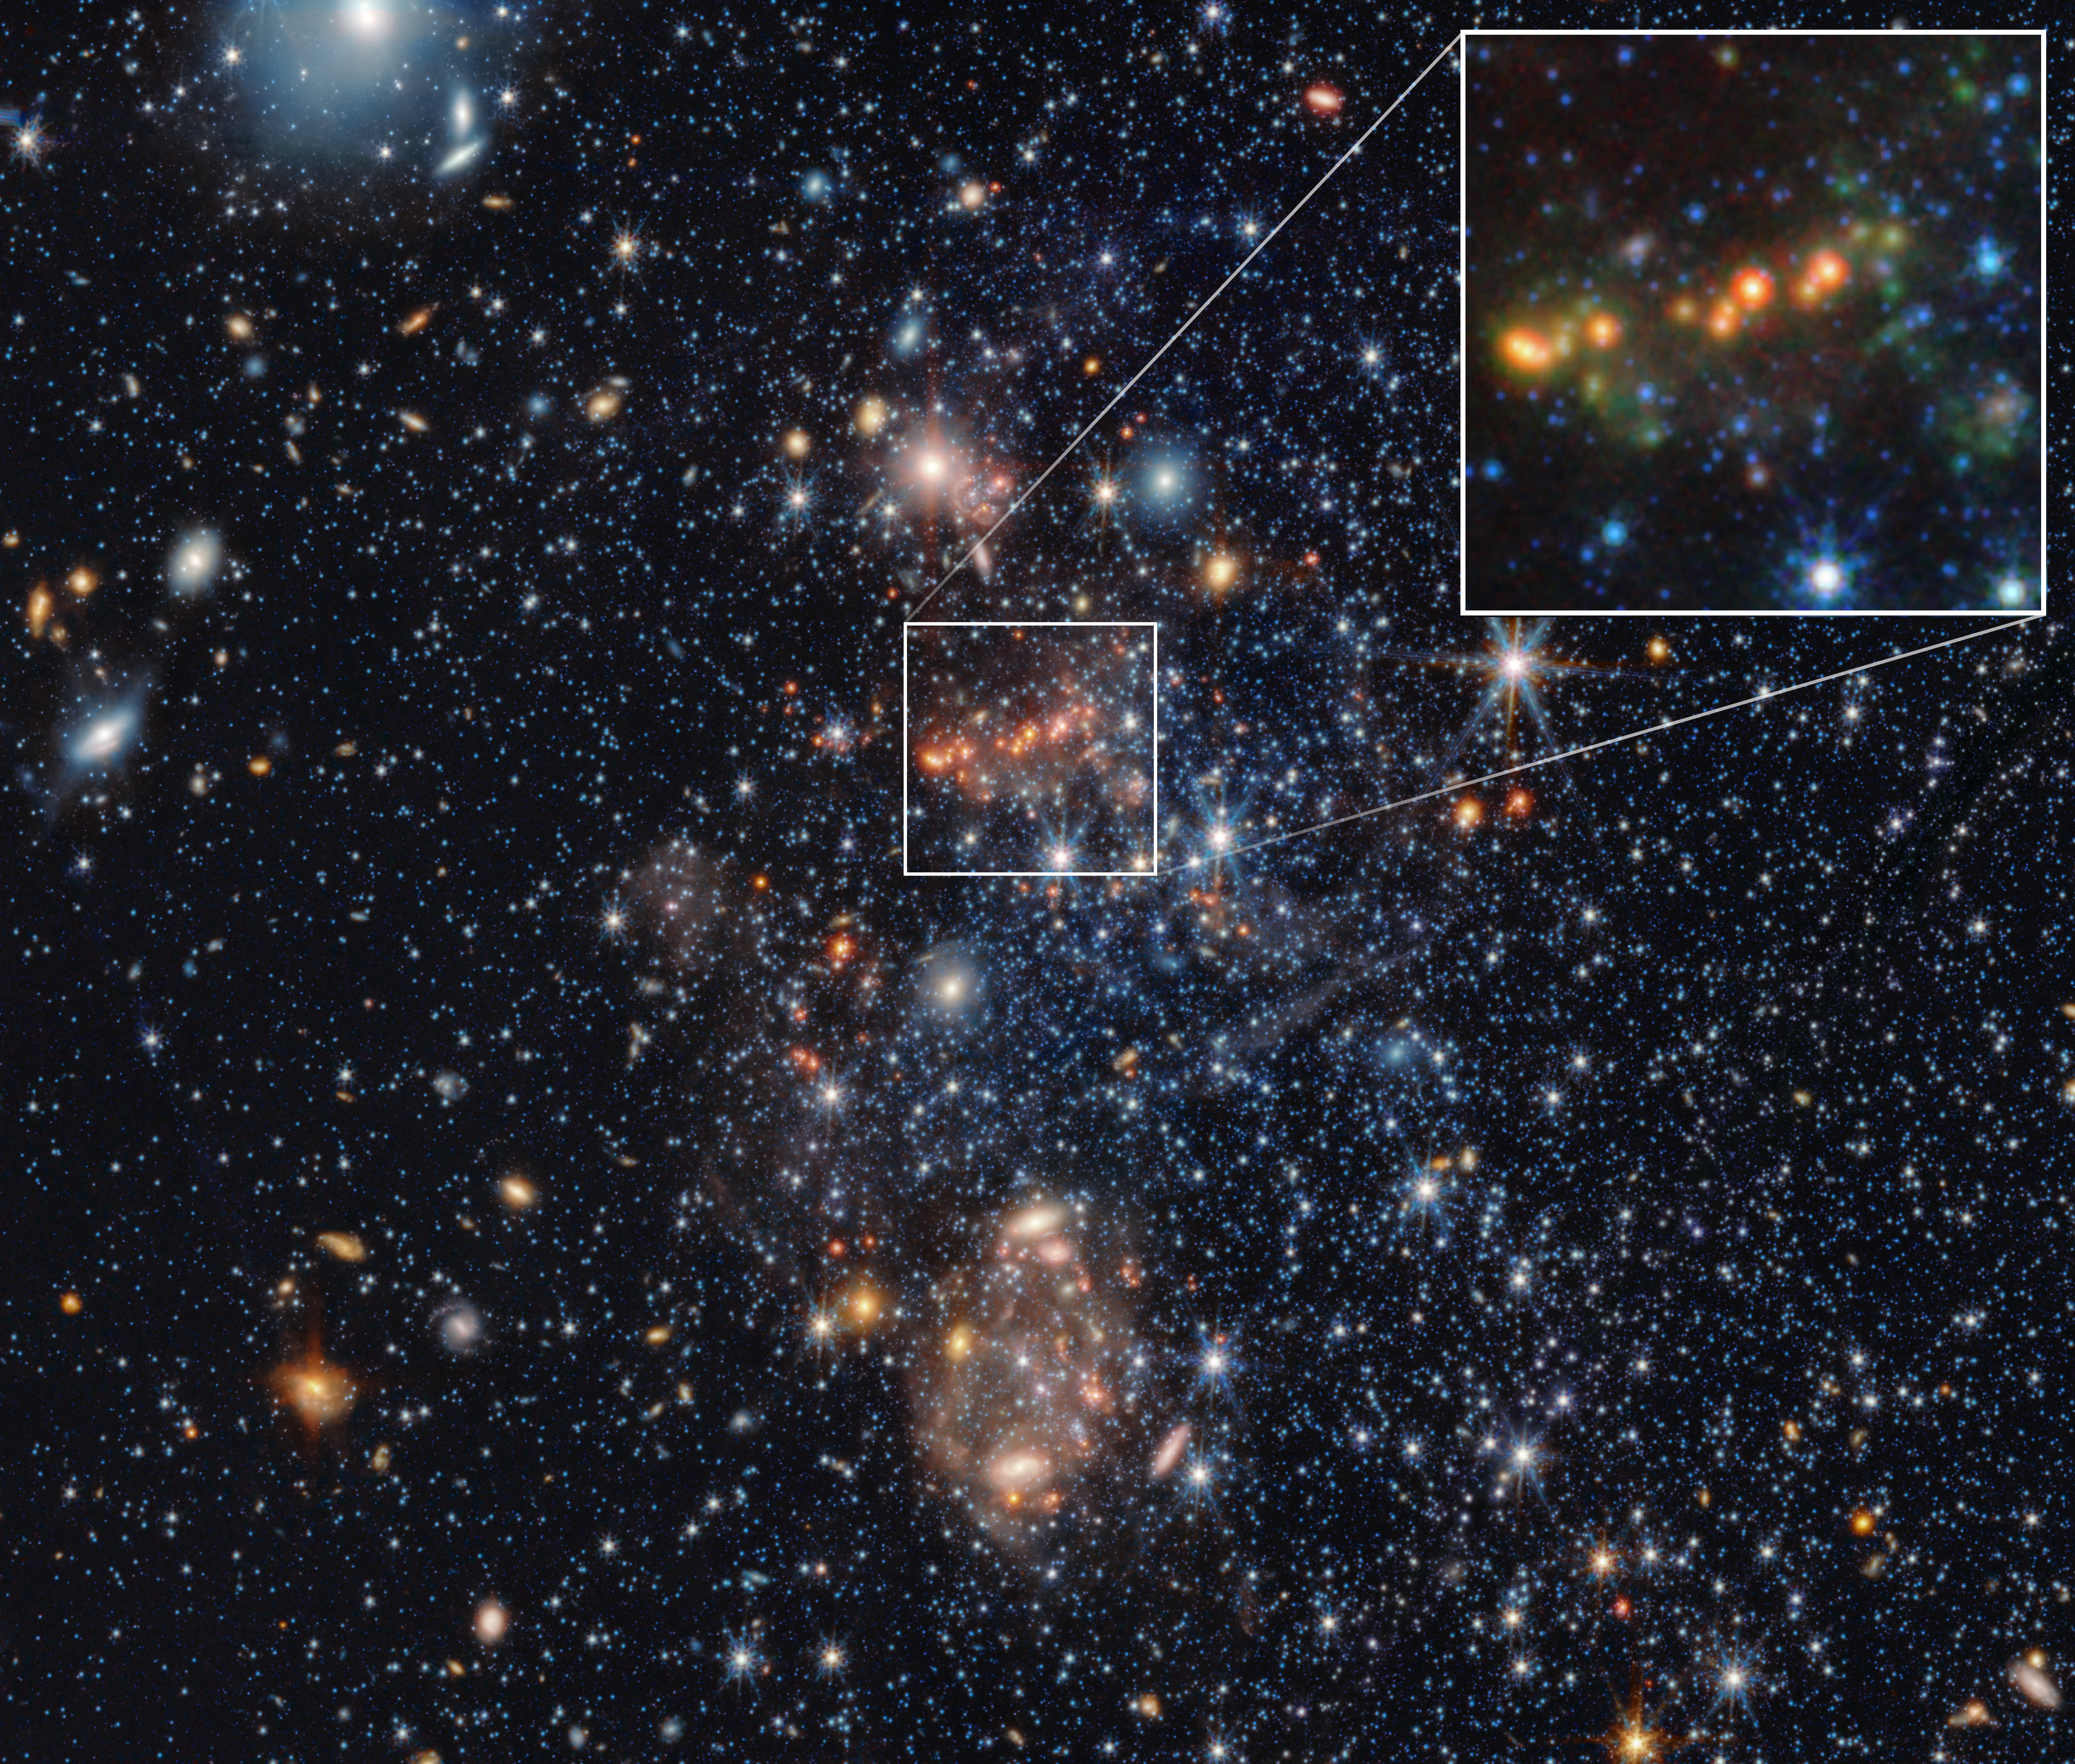

Sextans A PAHs pull-out (NIRCam and MIRI image)

Using the NASA/ESA/CSA James Webb Space Telescope, astronomers have spotted two rare kinds of dust in the dwarf galaxy Sextans A, one of the most chemically primitive galaxies near the Milky Way. The finding of metallic iron dust and silicon carbide (SiC) produced by aging stars, along with tiny clumps of carbon-based molecules, shows that even when the Universe had only a fraction of today’s heavy elements, stars and the interstellar medium could still forge solid dust grains. This research with Webb is reshaping ideas about how early galaxies evolved and developed the building blocks for planets.

Webb’s data of the dwarf galaxy Sextans A has revealed polycyclic aromatic hydrocarbons (PAHs), large carbon-based molecules that can be a signifier of star formation. In the above image, the inset at the top right zooms in on those PAHs, which are represented in green. In Sextans A, the PAHs are clumpy and relatively small.

Sextans A is a nearby galaxy that is chemically primitive, meaning it has a very low content of metals heavier than helium and hydrogen. It resembles galaxies that filled the early Universe, before stars had a chance to enrich the space with ‘metals’ like oxygen and iron. With the new discovery from Webb, Sextans A is now the lowest-metallicity galaxy ever found to contain PAHs.

This image was created with Webb data from proposal: 2391 (PI: J. Roman-Duval). More information about this result can be found here.

Credit: NASA, ESA, CSA, E. Tarantino (STScI), M. Boyer (STScI), J. Roman-Duval (STScI), Image Processing: A. Pagan (STScI)